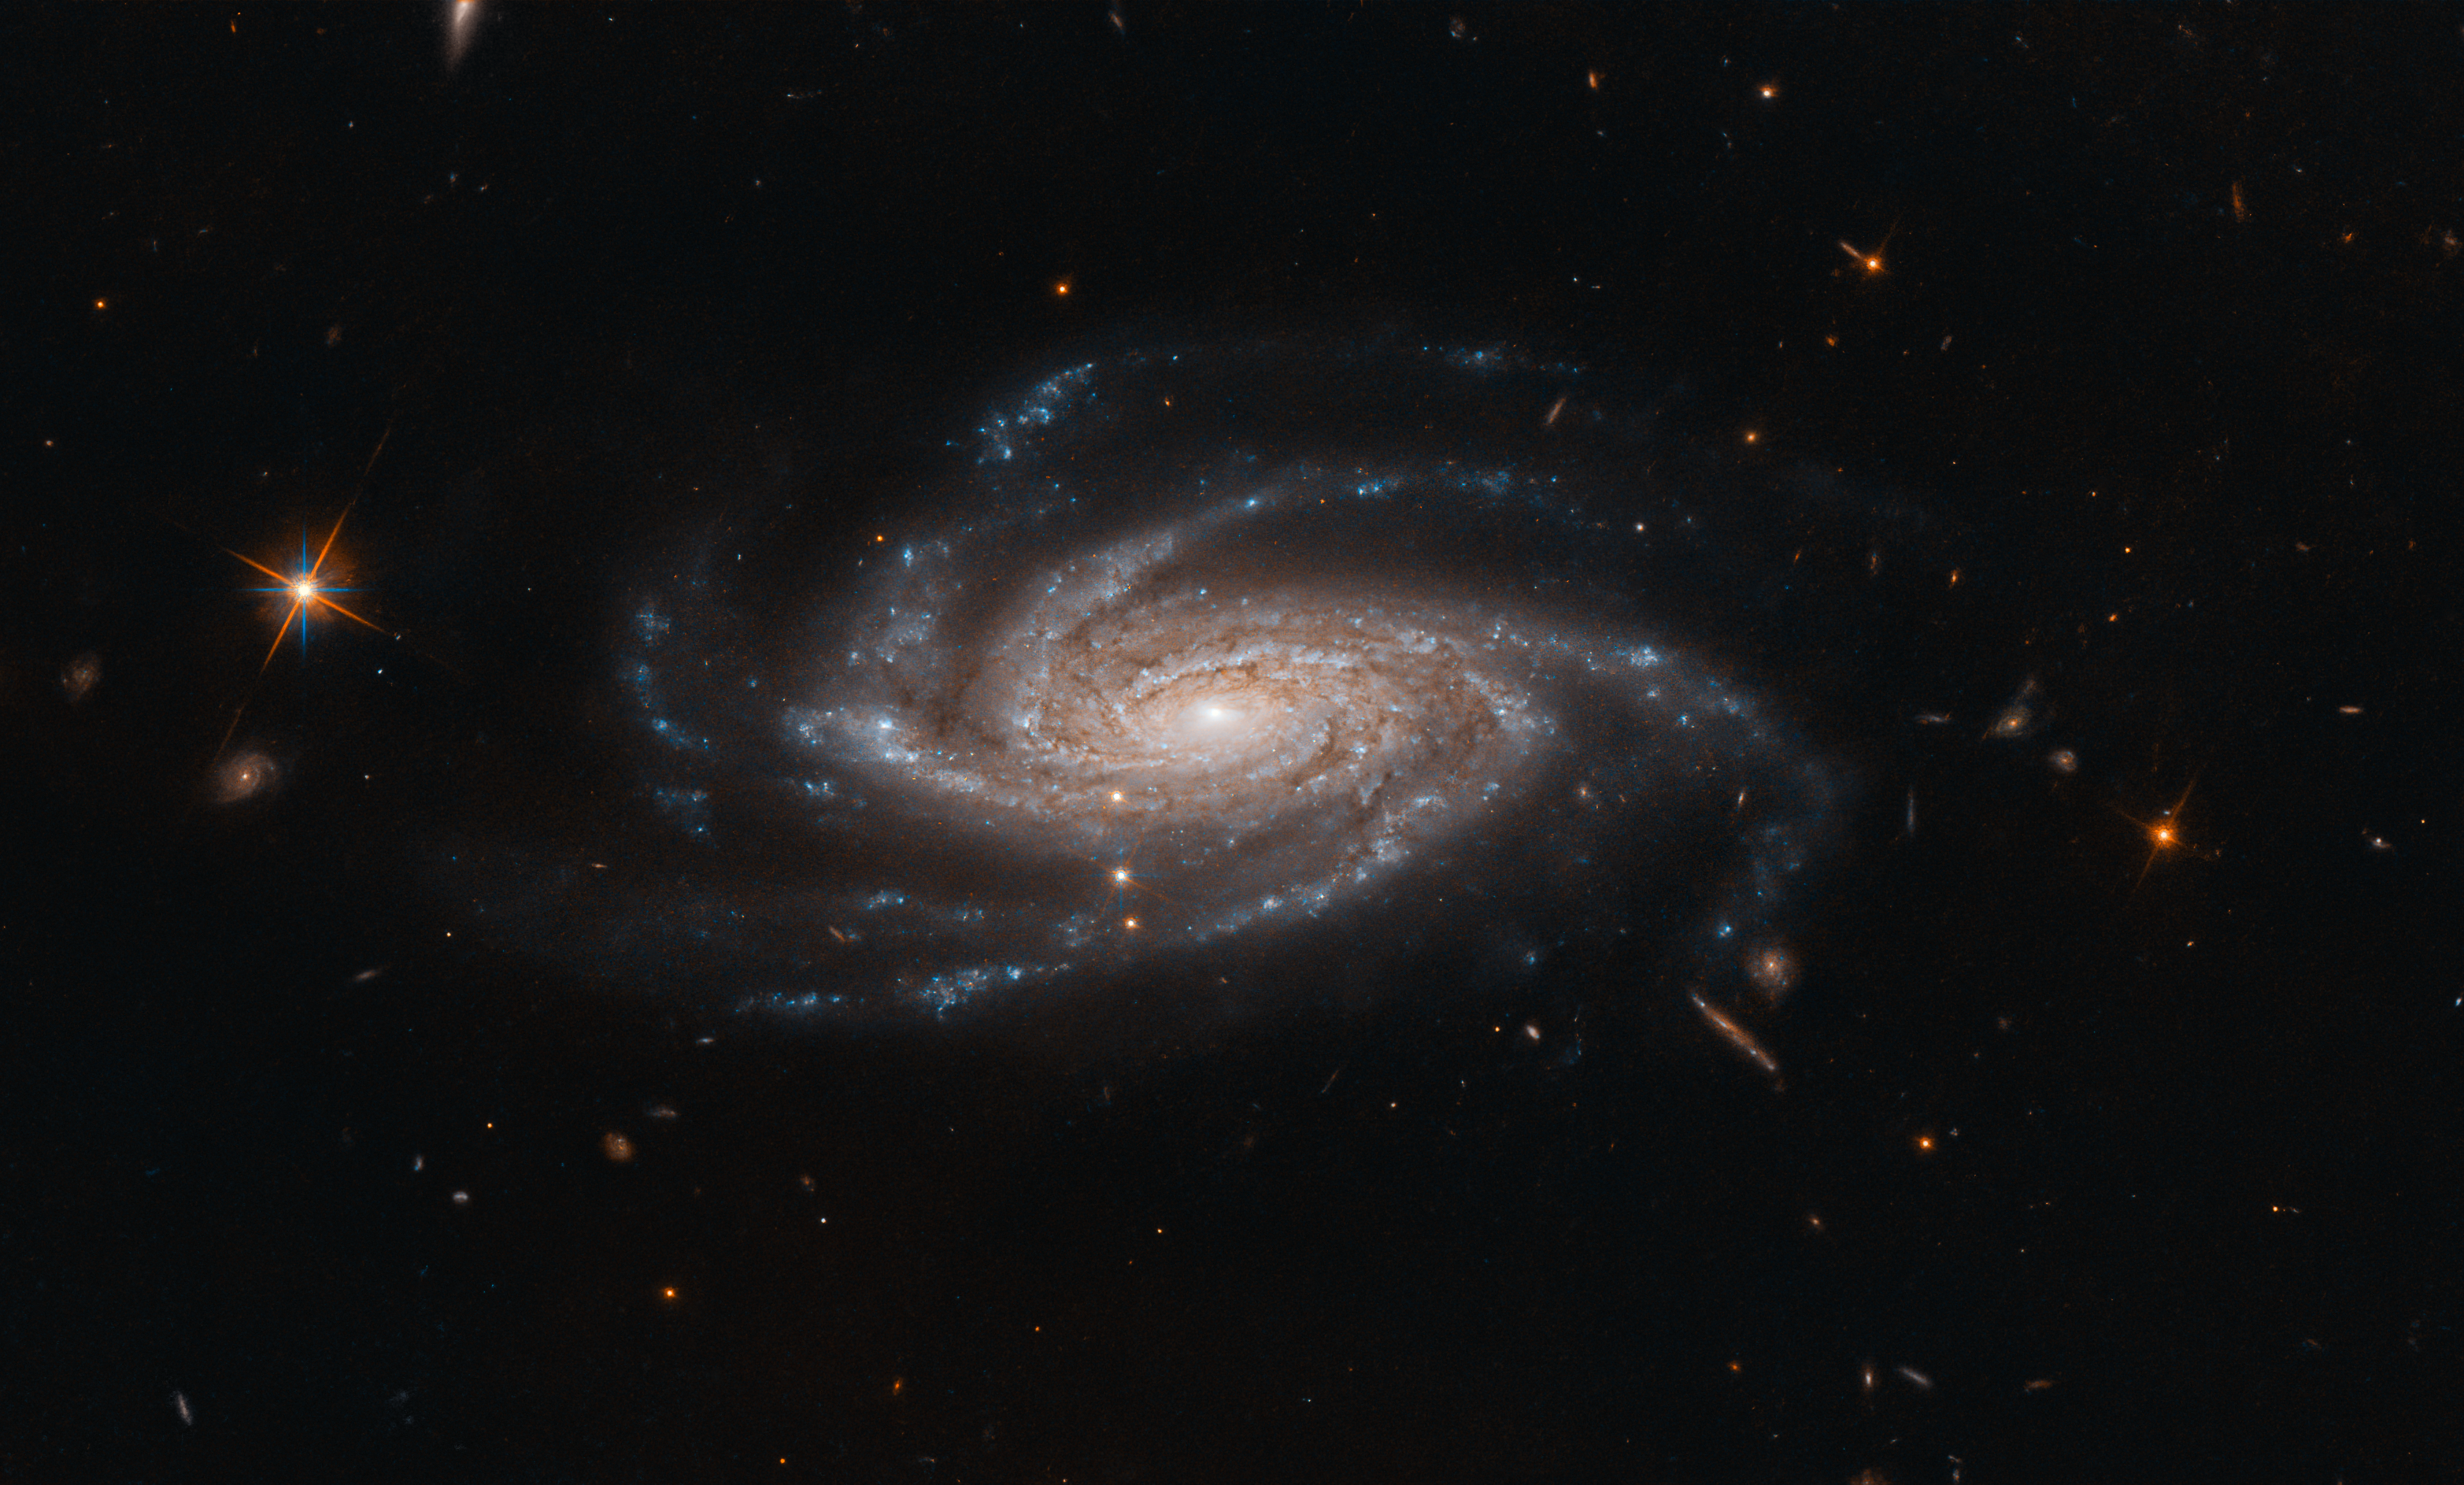

Open Arms

The spiral galaxy NGC 2008 sits centre stage, its ghostly spiral arms spreading out towards us, in this image captured by the NASA/ESA Hubble Space Telescope.

This galaxy is located about 425 million light-years from Earth in the constellation of Pictor (The Painter’s Easel). Discovered in 1834 by astronomer John Herschel, NGC 2008 is categorised as a type Sc galaxy in the Hubble sequence, a system used to describe and classify the various morphologies of galaxies. The “S” indicates that NGC 2008 is a spiral, while the “c” means it has a relatively small central bulge and more open spiral arms. Spiral galaxies with larger central bulges tend to have more tightly wrapped arms, and are classified as Sa galaxies, while those in between are classified as type Sb.

Spiral galaxies are ubiquitous across the cosmos, comprising over 70% of all observed galaxies — including our own, the Milky Way. However, their ubiquity does not detract from their beauty. These grand, spiralling collections of billions of stars are among the most wondrous sights that have been captured by telescopes such as Hubble, and are firmly embedded in astronomical iconography.

Credit: ESA/Hubble & NASA, A. Bellini